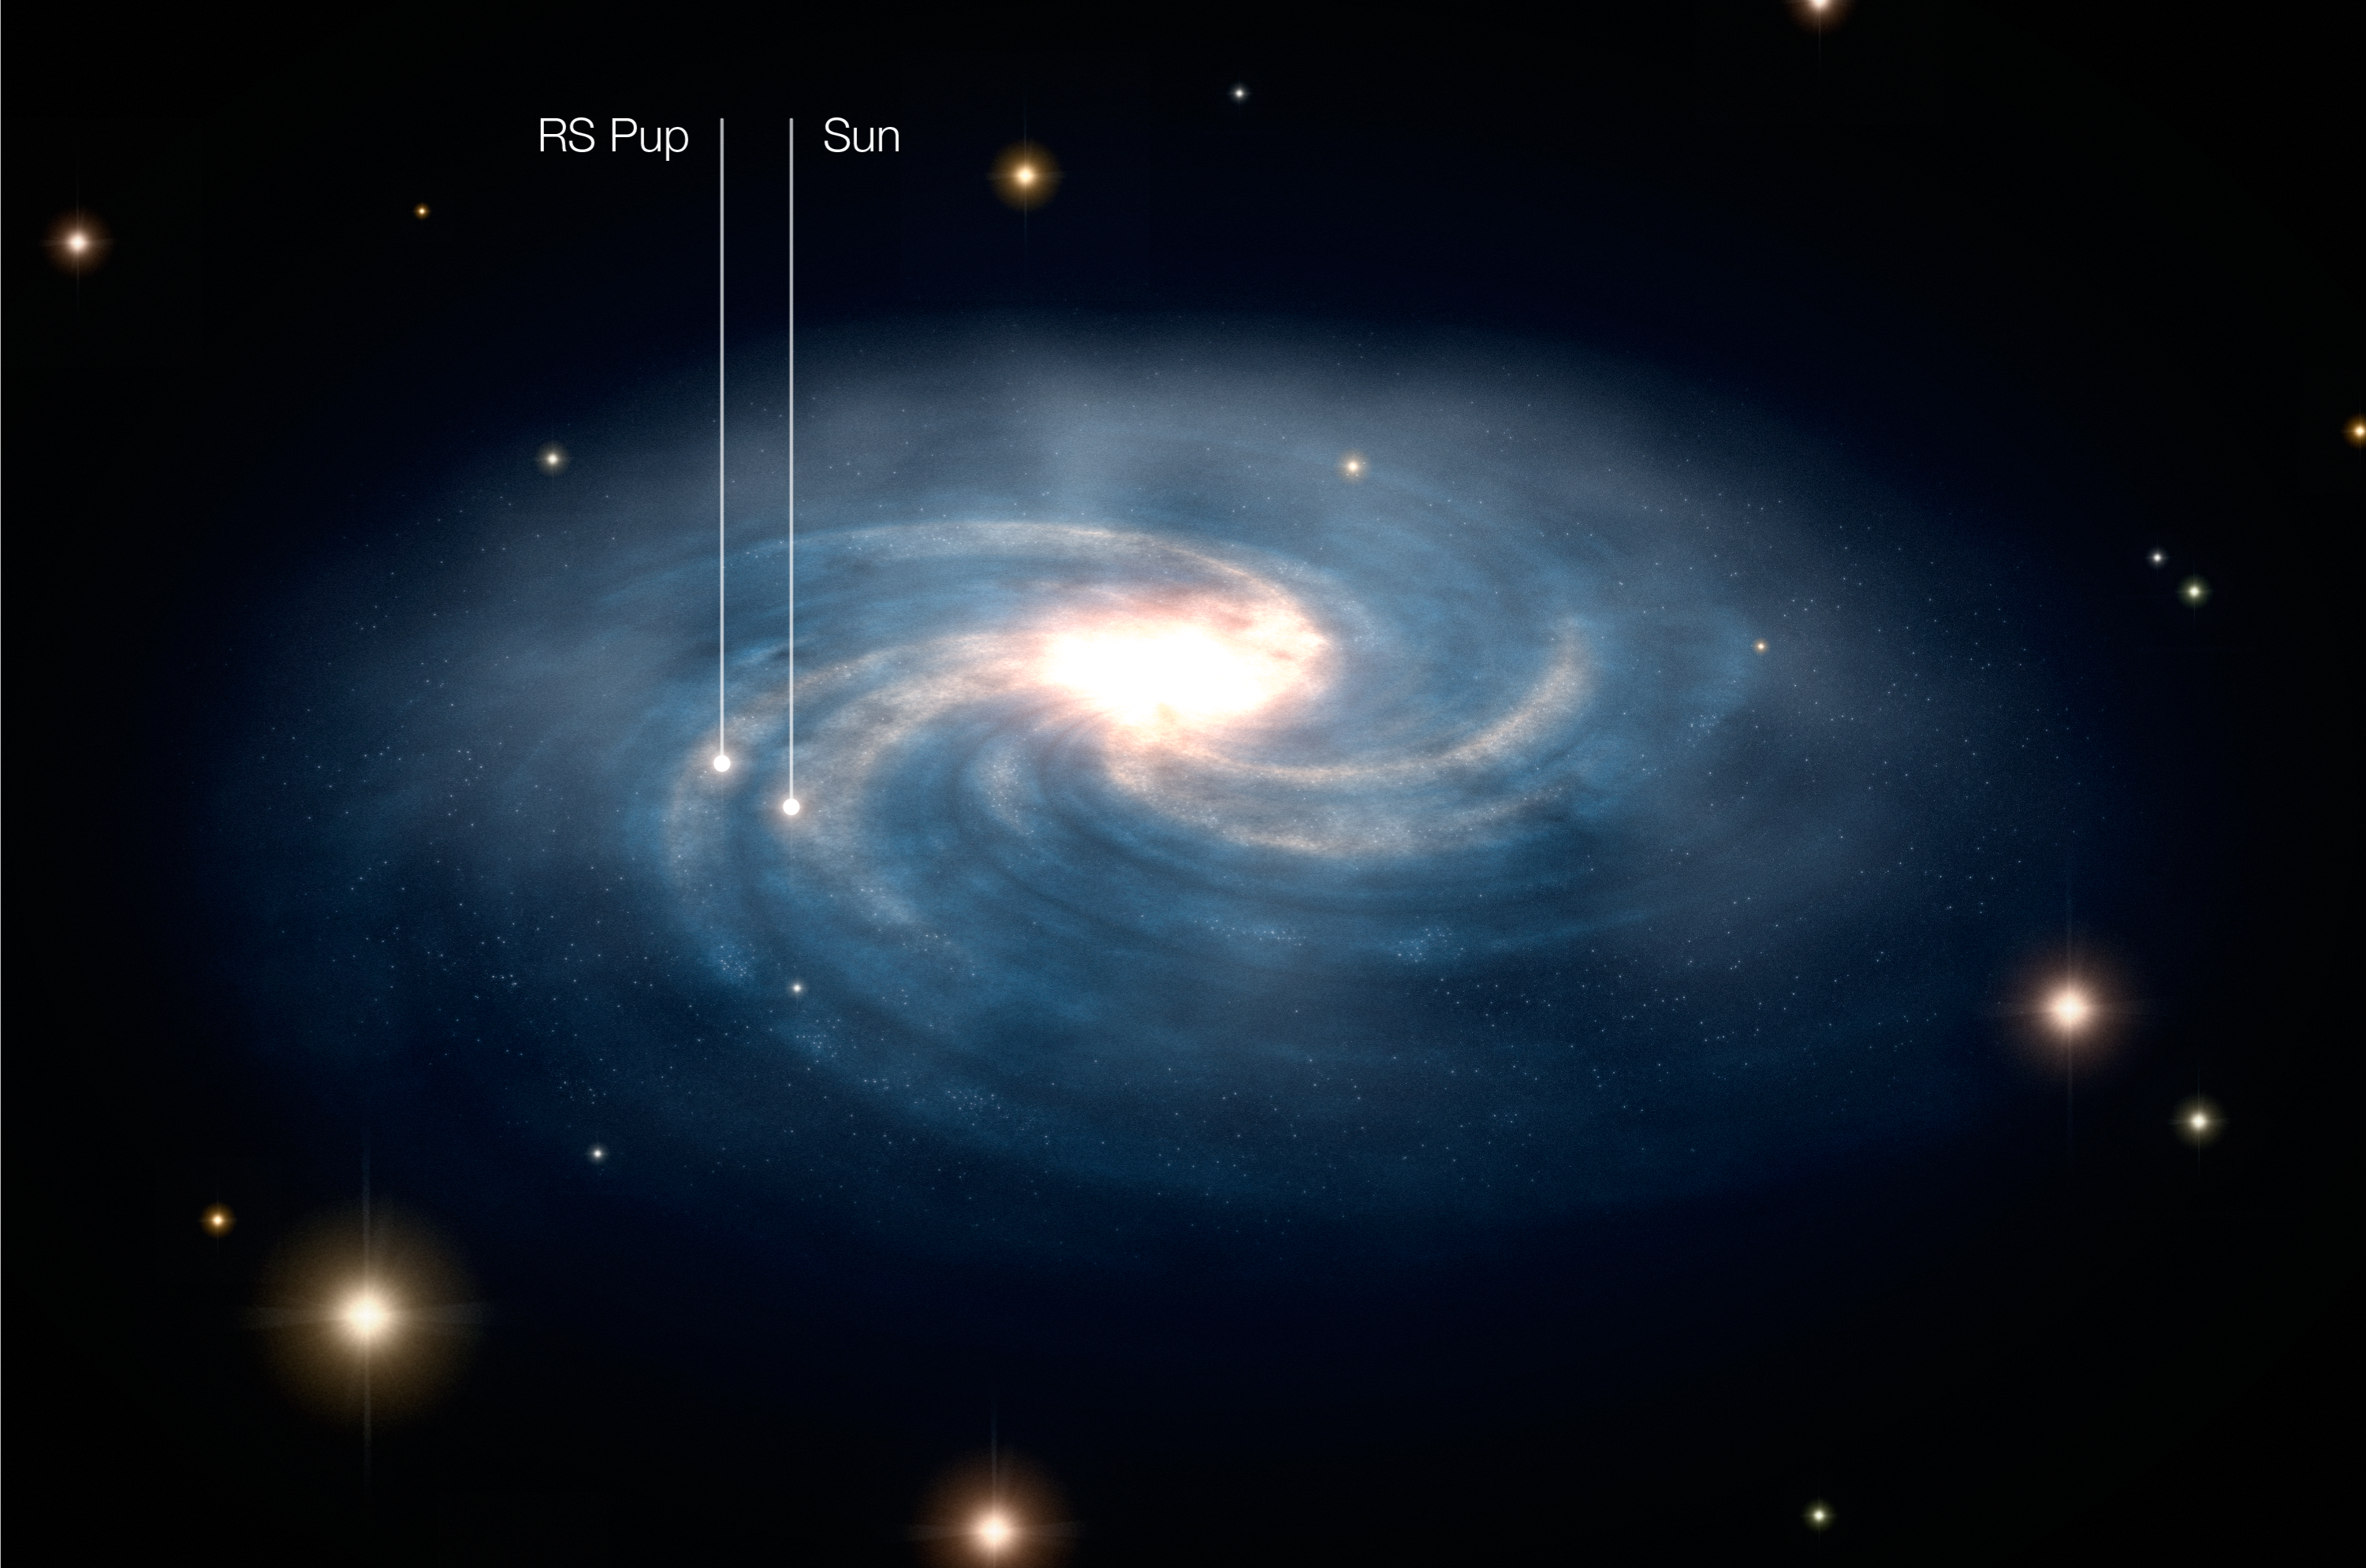

The location of RS Puppis within the Milky Way (artist’s impression)

This artist's impression shows the location of the Cepheid star RS Pup in our Galaxy. From ESO NTT observations of the echoes on several nebular features, the distance of RS Pup was found to be 6,500 light-years, with an uncertainty of 90 light-years. RS Pup is distant by about a quarter of the distance between the Sun and the Centre of the Milky Way. RS Pup is located within the Galactic plane, in a very populated region of our Galaxy.

Credit: ESA/Hubble & ESO